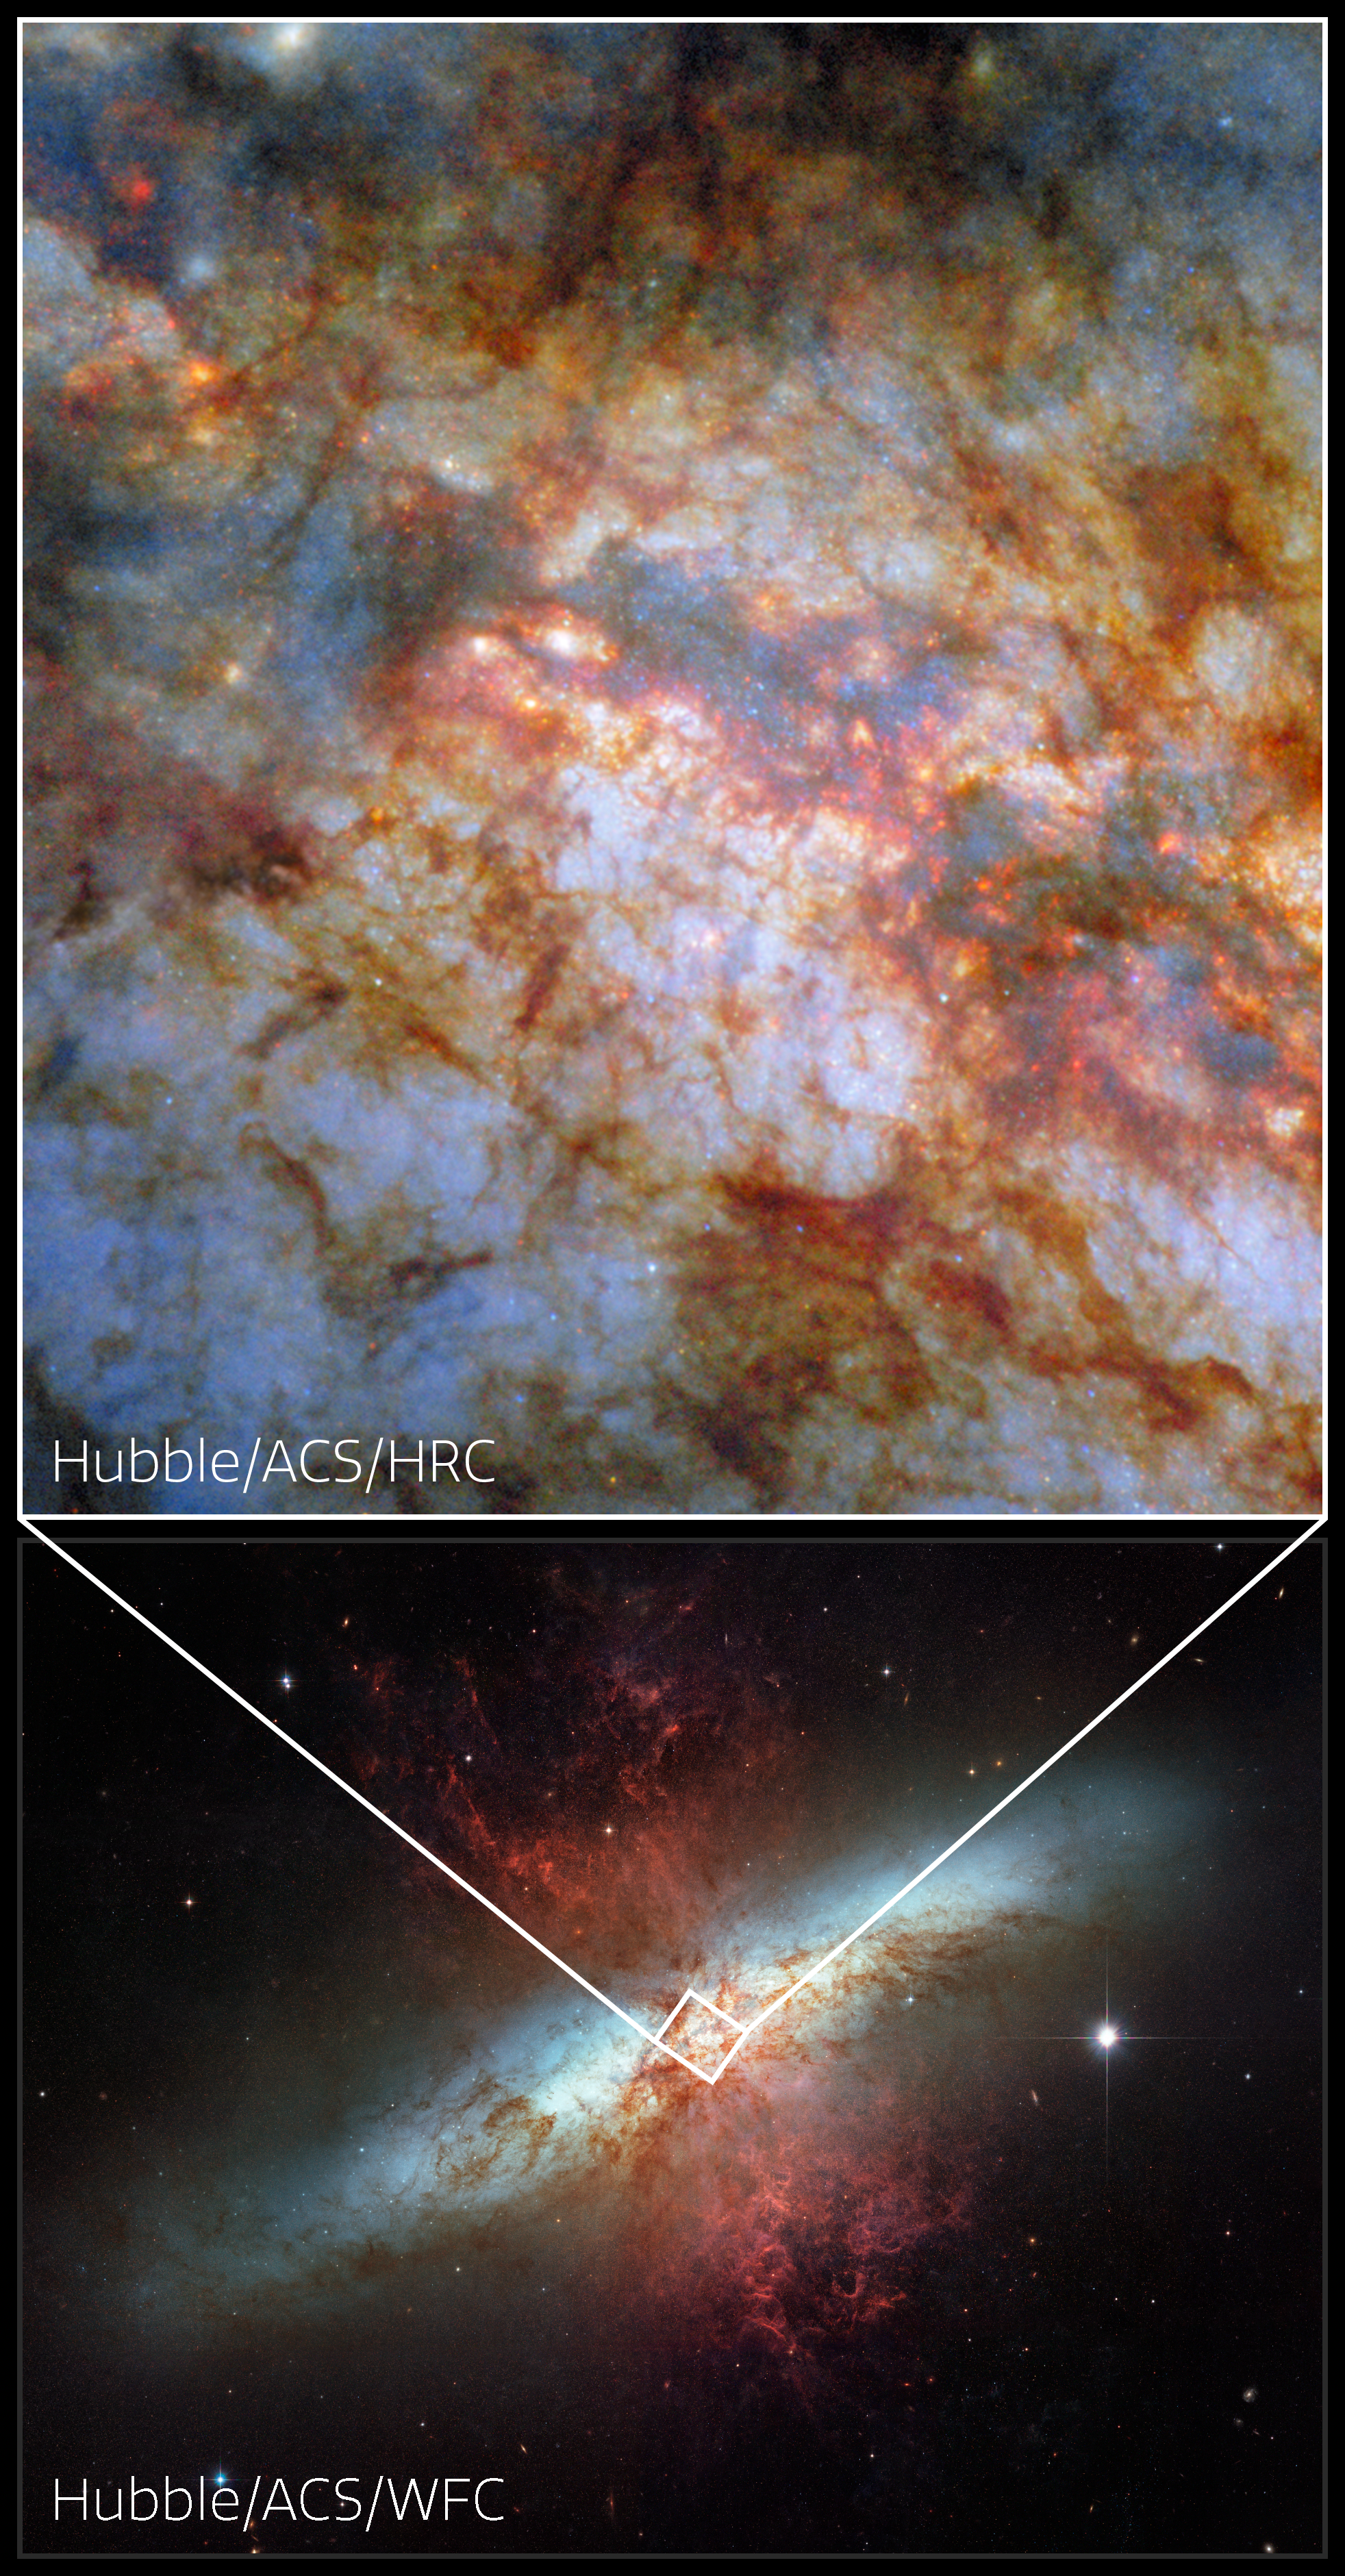

M82 and its smouldering heart (vertical collage)

What lurks behind the dense, dusty clouds of this galactic neighbour? There lies the star-powered heart of the galaxy Messier 82 (M82), also known as the Cigar Galaxy. Located just 12 million light-years away in the constellation Ursa Major (The Great Bear), the Cigar Galaxy is considered a nearby galaxy. As this NASA/ESA Hubble Space Telescope Picture of the Week shows in great detail, it’s home to brilliant stars whose light is shaded by sculptural clouds, clumps and streaks of dust and gas.

It’s no surprise that the Cigar Galaxy is so packed with stars, obscured though they might be by the distinctive clouds pictured here. Forming stars 10 times faster than the Milky Way, the Cigar Galaxy is what astronomers call a starburst galaxy. The intense starburst period that grips this galaxy has given rise to super star clusters in the galaxy’s heart. Each of these super star clusters contains hundreds of thousands of stars and is more luminous than a typical star cluster. Researchers used Hubble to home in on these massive clusters and reveal how they form and evolve.

This image compares two sets of data captured by the Advanced Camera for Surveys (ACS). Below is an image of the Cigar Galaxy released in 2006, in celebration of Hubble’s 16th birthday. It was taken with ACS’s Wide Field Channel that is designed for broad surveys. Above, newly processed data from the ACS High Resolution Channel creates a new view of the highly active super star clusters in M82’s heart. The High Resolution Channel, operational from 2002 to 2007, excelled at detailed observations of crowded, starry environments like the centres of starburst galaxies.

Credit: ESA/Hubble & NASA, the Hubble Heritage Team (STScI), W. D. Vacca